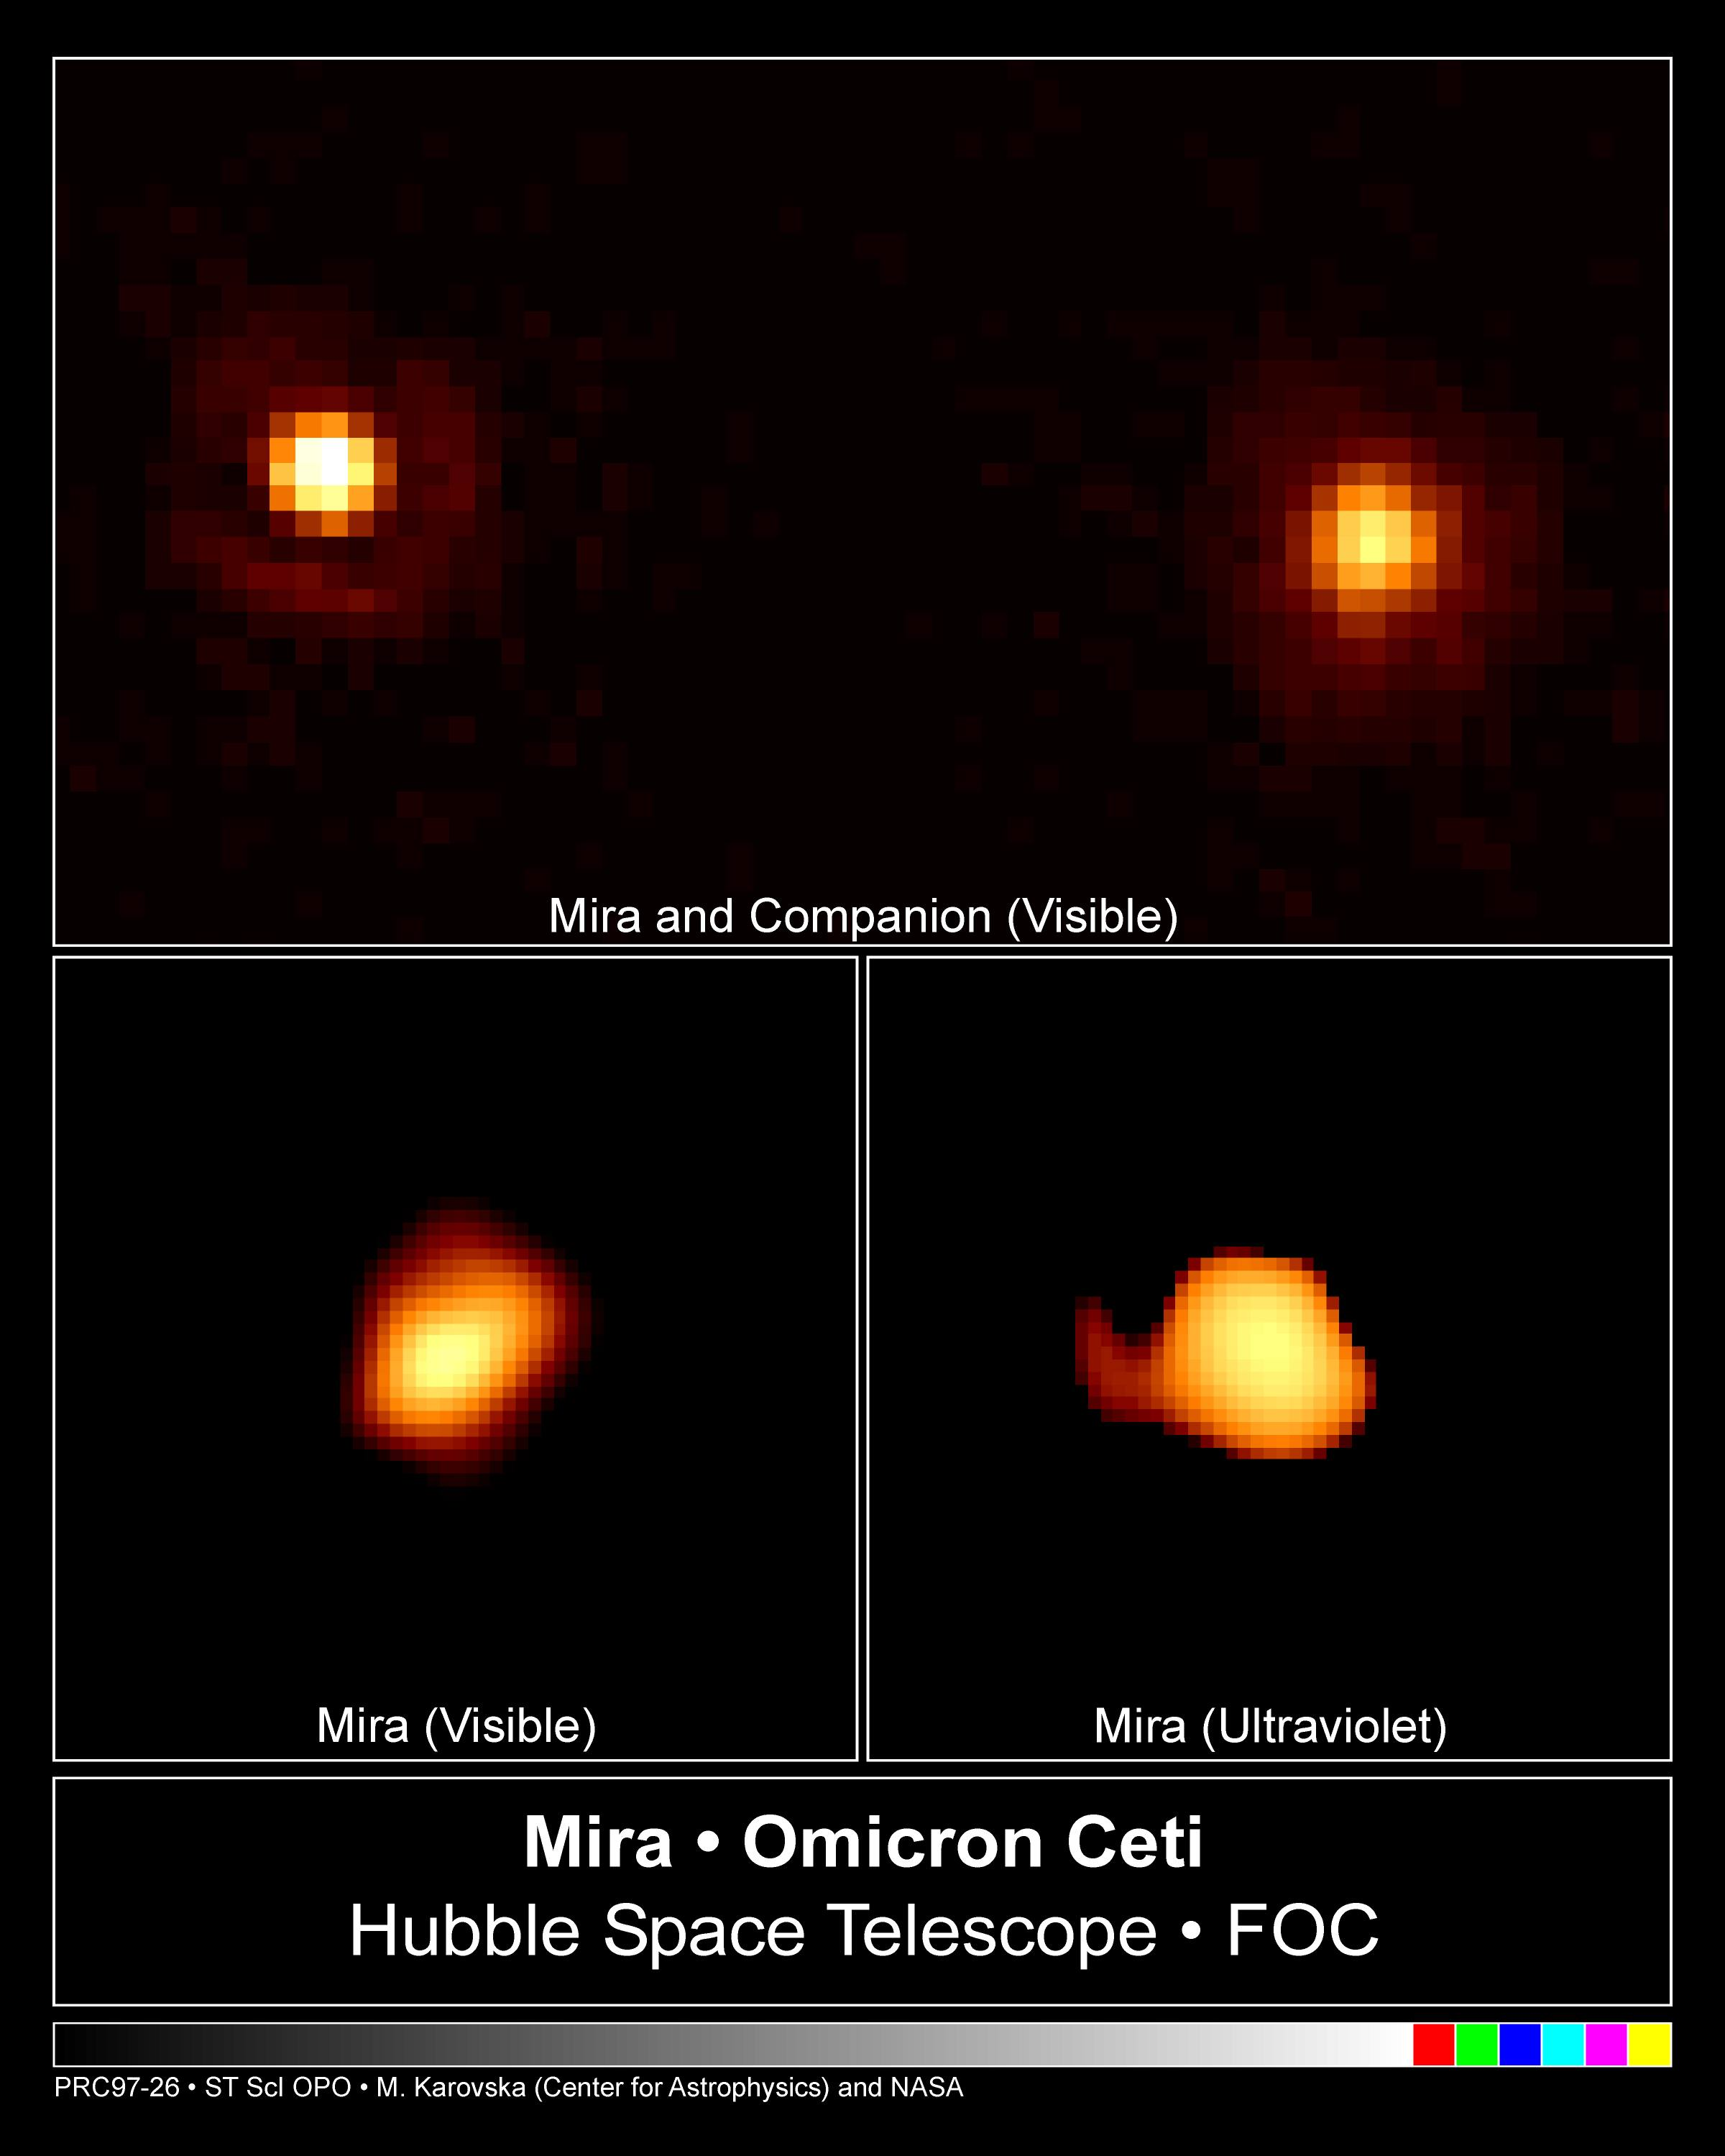

Omicron Ceti

This is a NASA/ESA Hubble Space Telescope image of the cool red giant star Mira A (right), officially called Omicron Ceti in the constellation Cetus, and its nearby hot companion (left) taken on December 11, 1995 in visible light using the European Space Agency's Faint Object Camera (FOC).

Credit: Margarita Karovska (Harvard-Smithsonian Center for Astrophysics), and NASA/ESA